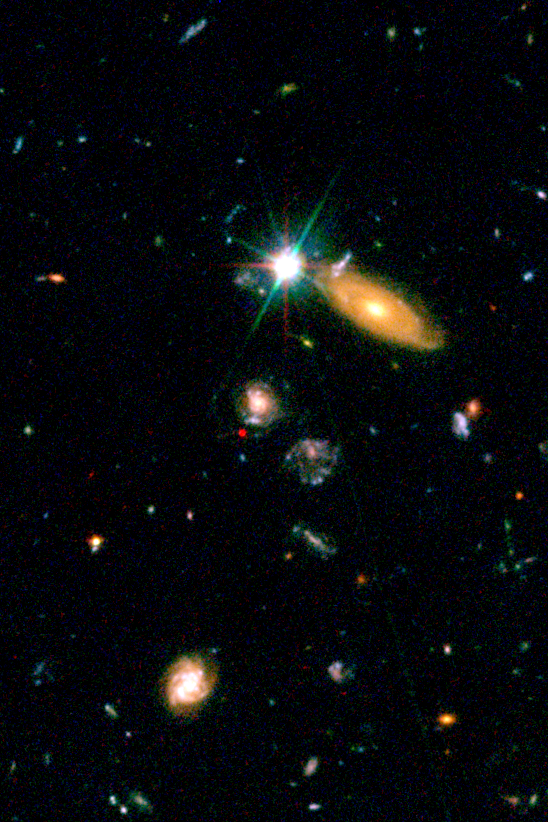

SN2002dd in the HDF North - 2002

The red spot is the glow of a very distant supernova captured exploding in the field. The supernova is estimated to be 8 billion light-years away. The supernova appears deep red in this composite image because it was photographed by the ACS at far-red wavelengths. Distant supernovae are used by astronomers to fill in the blank region where the universe's rate of expansion switched from deceleration due to gravity to acceleration due to the repulsive force of 'dark energy.'

Credit: NASA/ESA and J. Blakeslee (JHU)